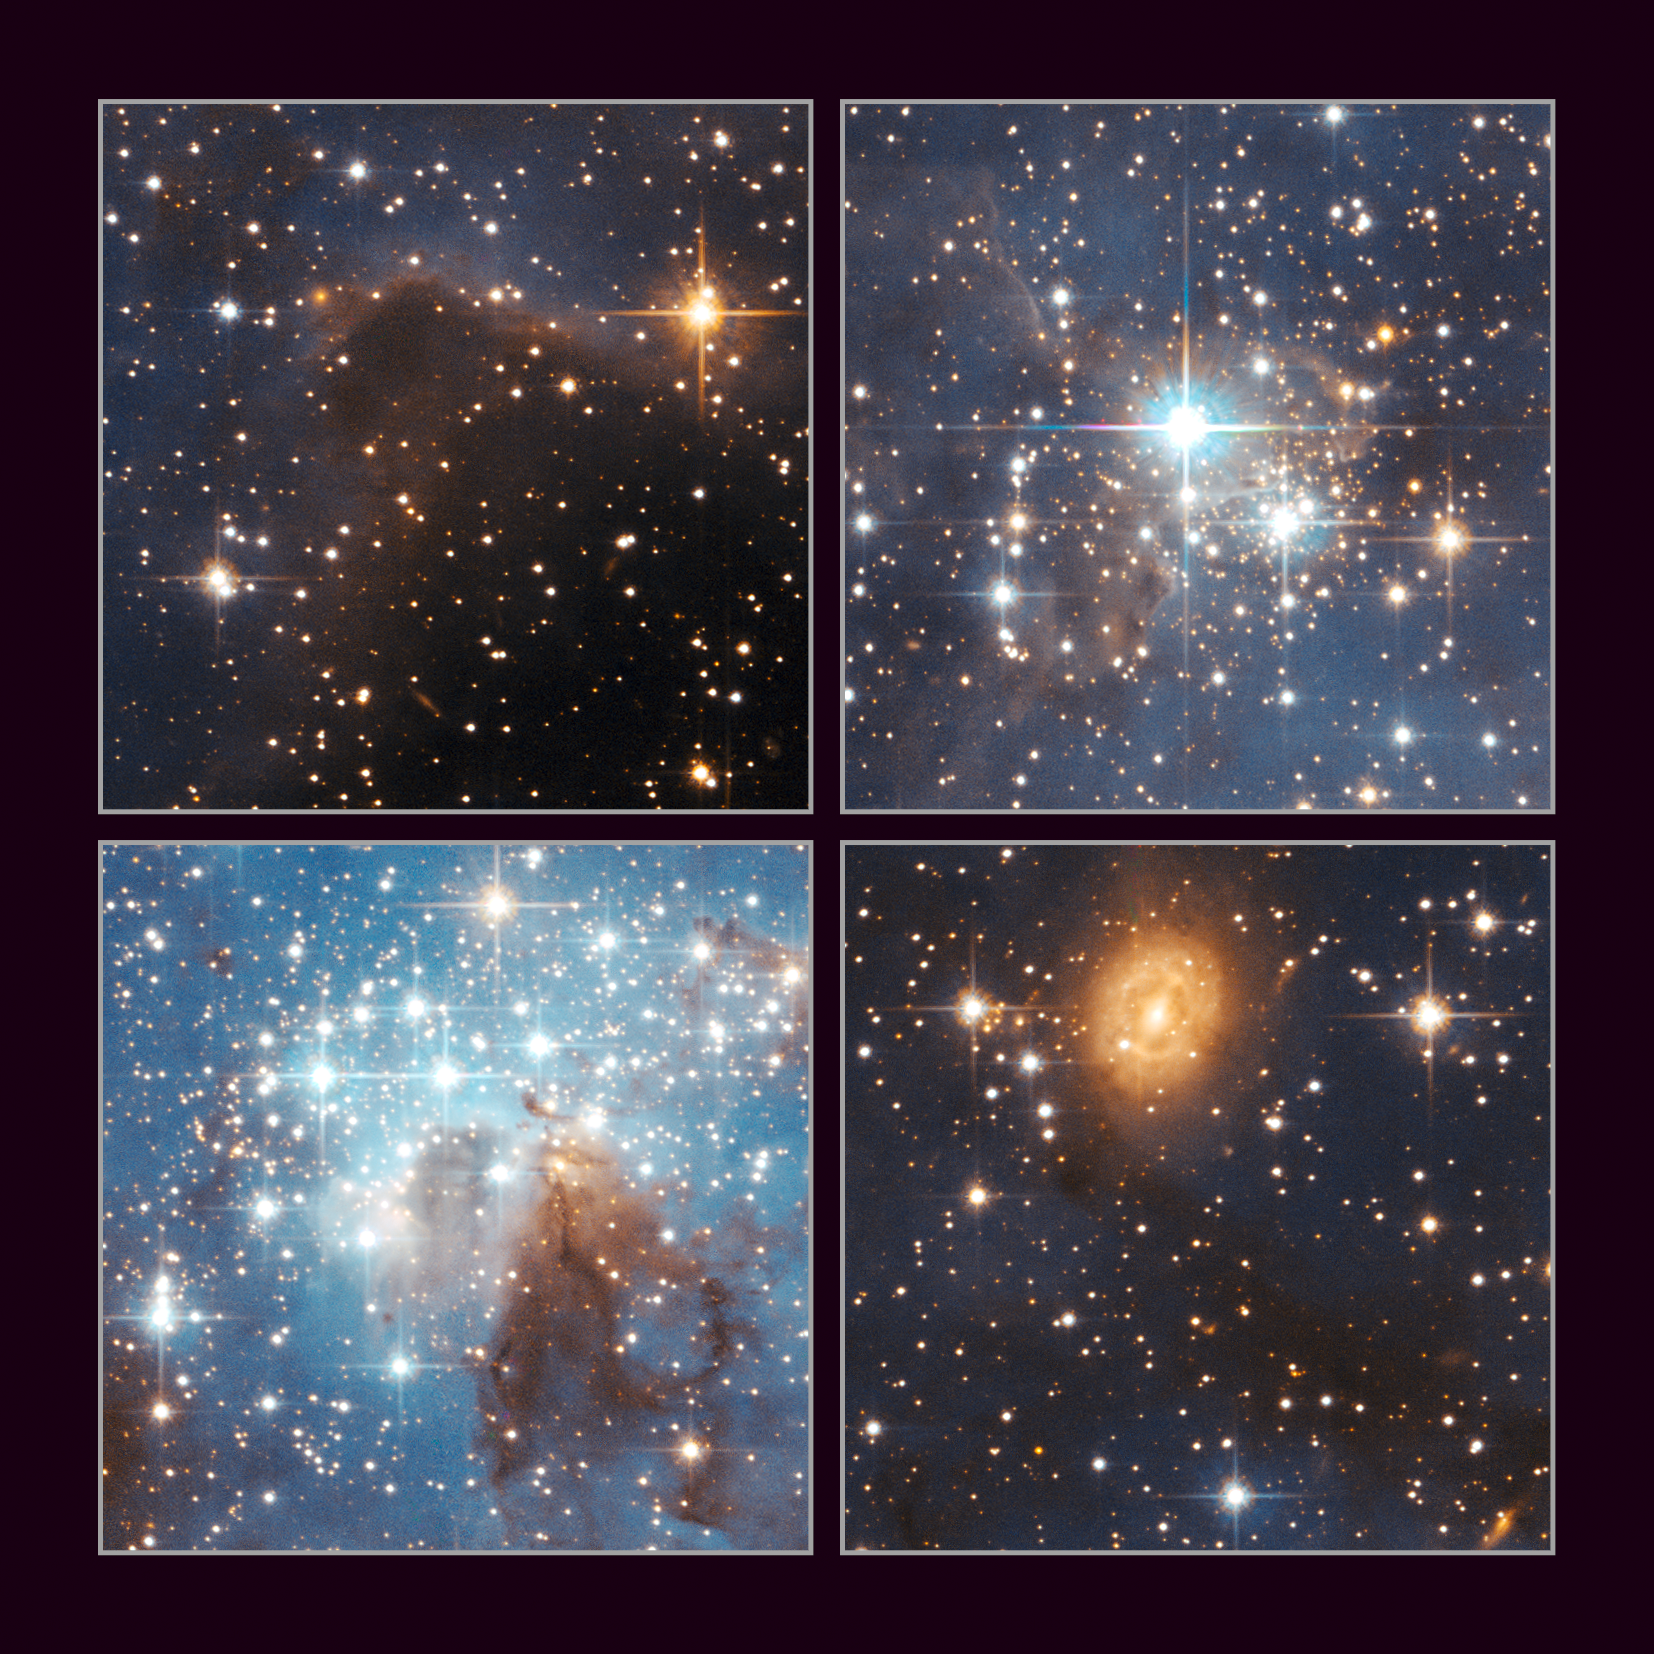

Large and small stars in harmonious coexistence

These images reveal details of the LH 95 region. From top to bottom and left to right they show a dense part of the parental molecular cloud, a compact cluster of faint infant stars, the main part of LH 95, where massive and low-mass stars coexist close to a dusty lane, and one of the remarkable background galaxies.

Credit: NASA, ESA